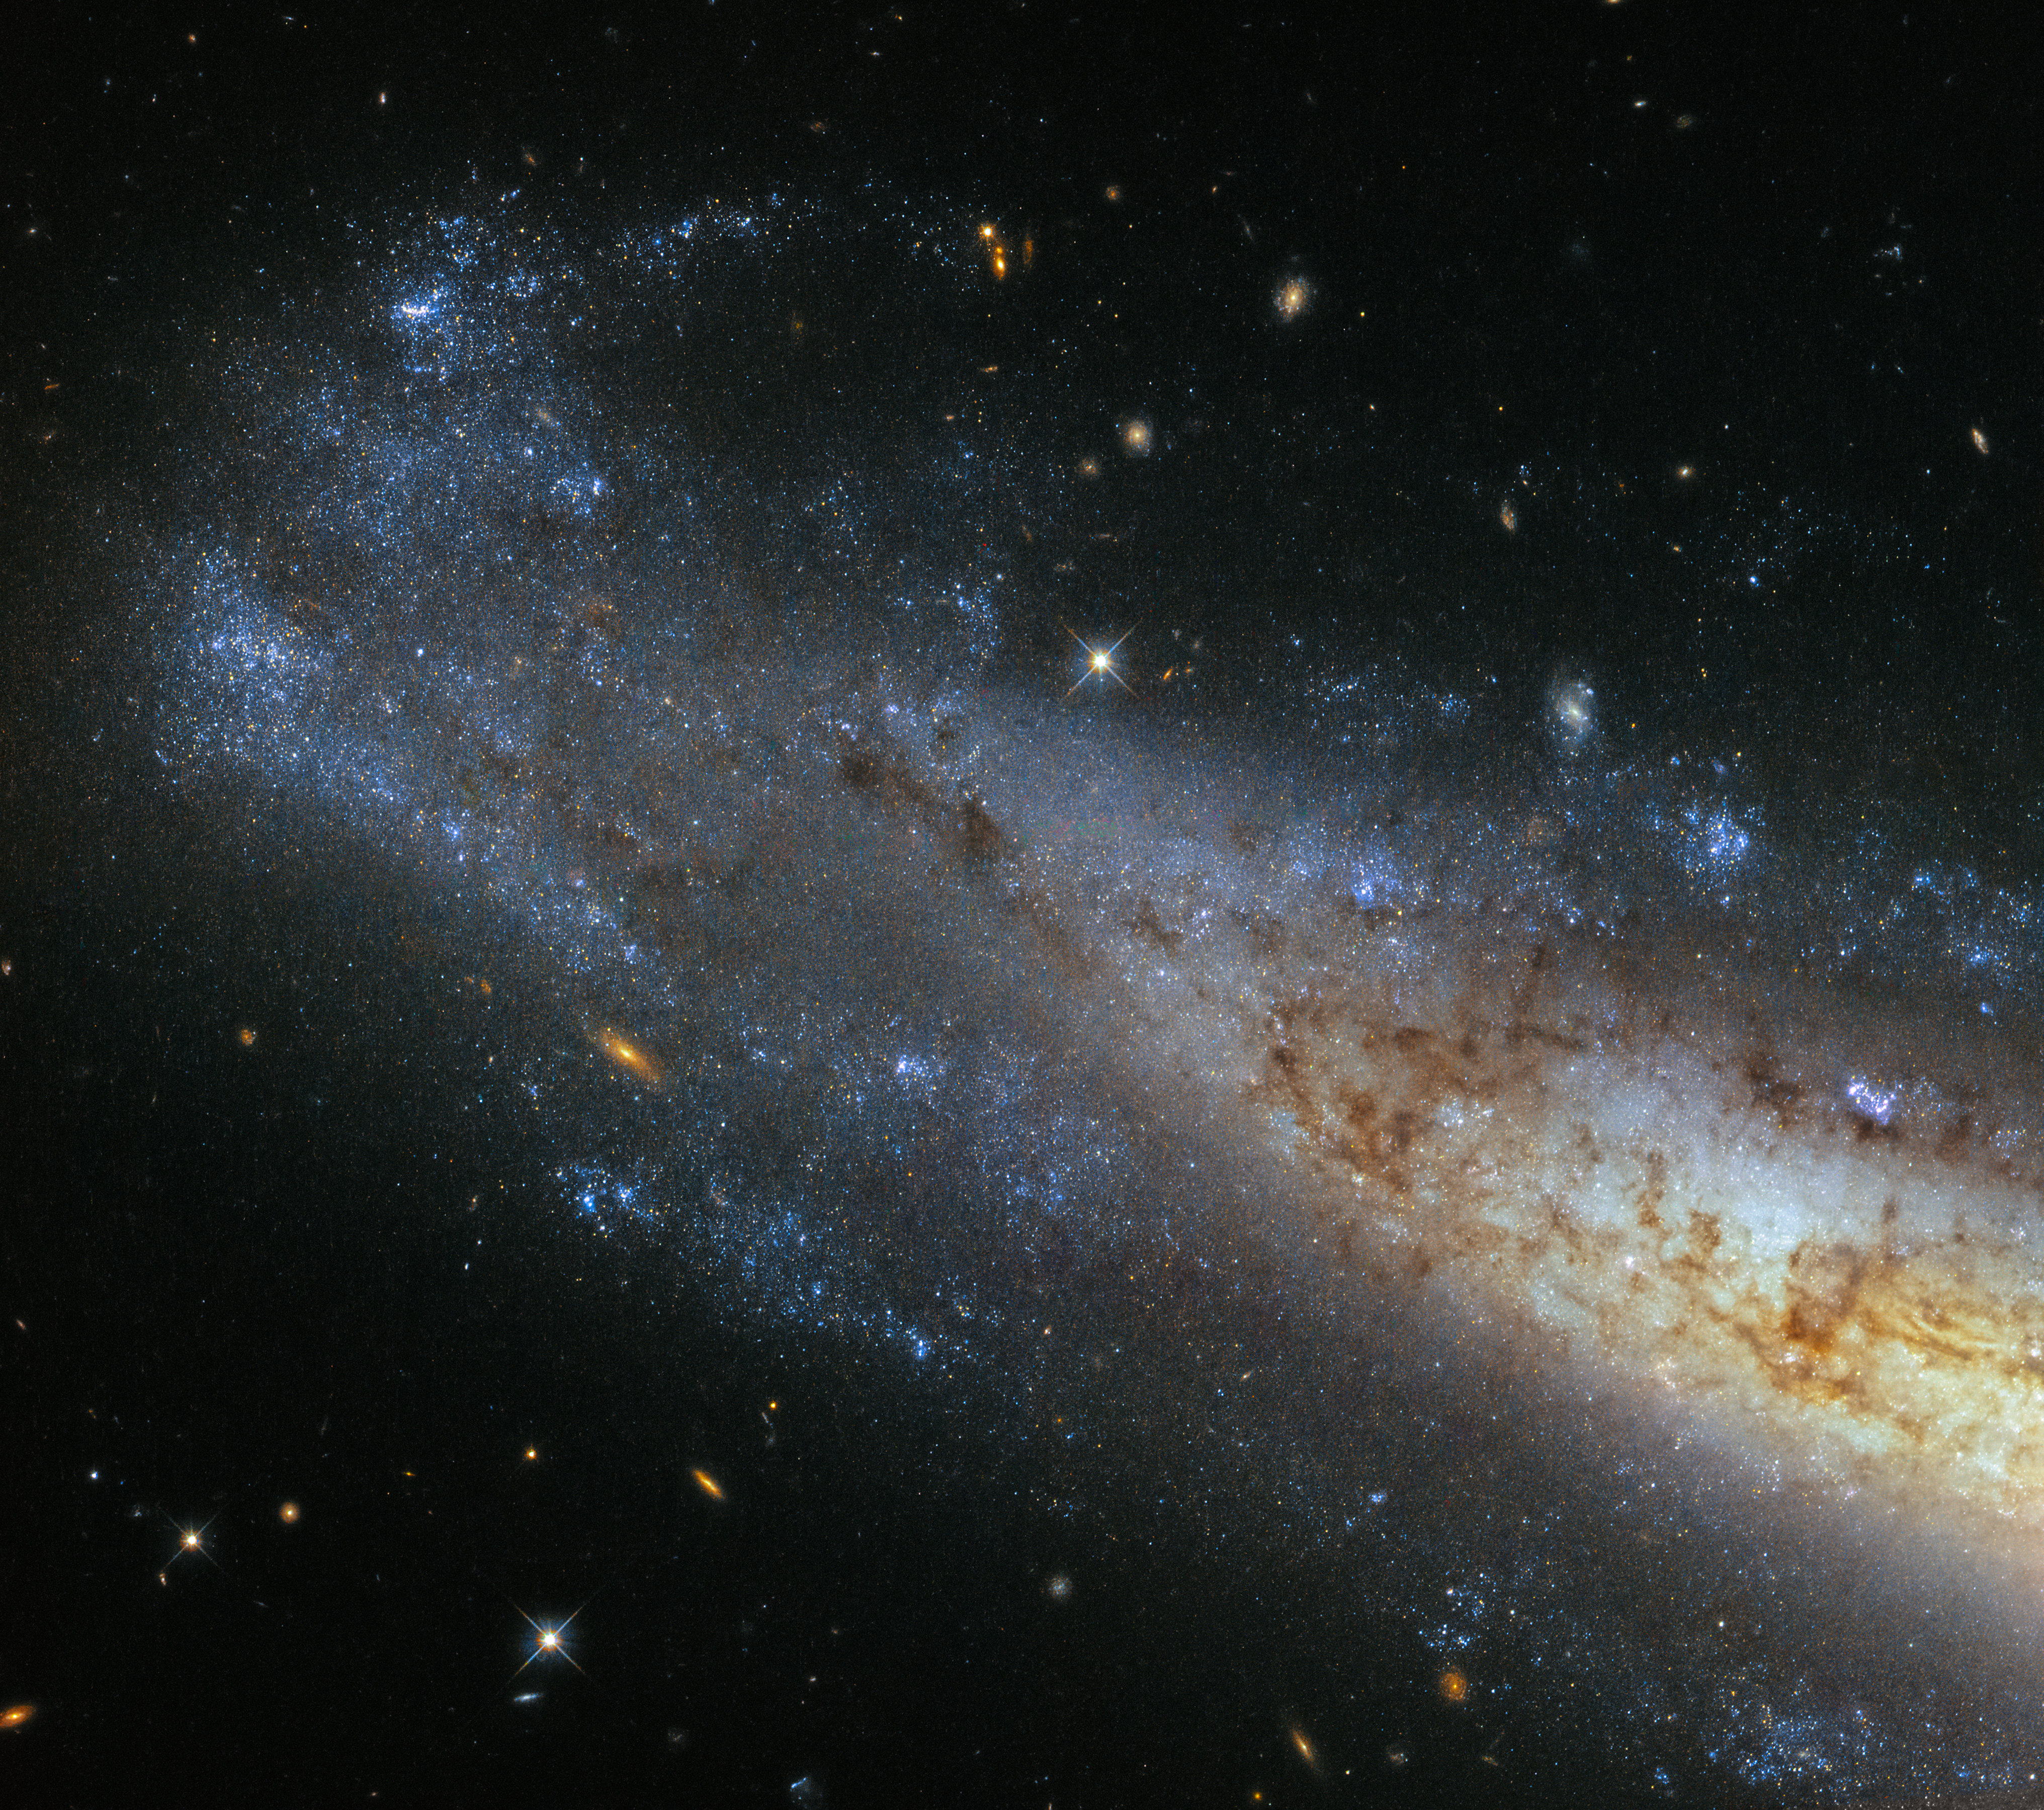

Seeing things sideways

This image from Hubble’s Wide Field Camera 3 (WFC3) shows NGC 1448, a spiral galaxy located about 50 million light-years from Earth in the little-known constellation of Horologium (The Pendulum Clock). We tend to think of spiral galaxies as massive and roughly circular celestial bodies, so this glittering oval does not immediately appear to fit the visual bill. What’s going on?

Imagine a spiral galaxy as a circular frisbee spinning gently in space. When we see it face on, our observations reveal a spectacular amount of detail and structure — a great example from Hubble is the telescope’s view of Messier 51, otherwise known as the Whirlpool Galaxy. However, the NGC 1448 frisbee is very nearly edge-on with respect to Earth, giving it an appearance that is more oval than circular. The spiral arms, which curve out from NGC 1448’s dense core, can just about be seen.

Although spiral galaxies might appear static with their picturesque shapes frozen in space, this is very far from the truth. The stars in these dramatic spiral configurations are constantly moving and spinning around the galaxy’s core, with those on the inside whirling around faster than those sitting further out. This makes the formation and continued existence of a spiral galaxy’s arms something of a cosmic puzzle, because the arms wrapped around the spinning core should become wound tighter and tighter as time goes on — but this is not what we see. This is known as the winding problem.

Credit: ESA/Hubble & NASA